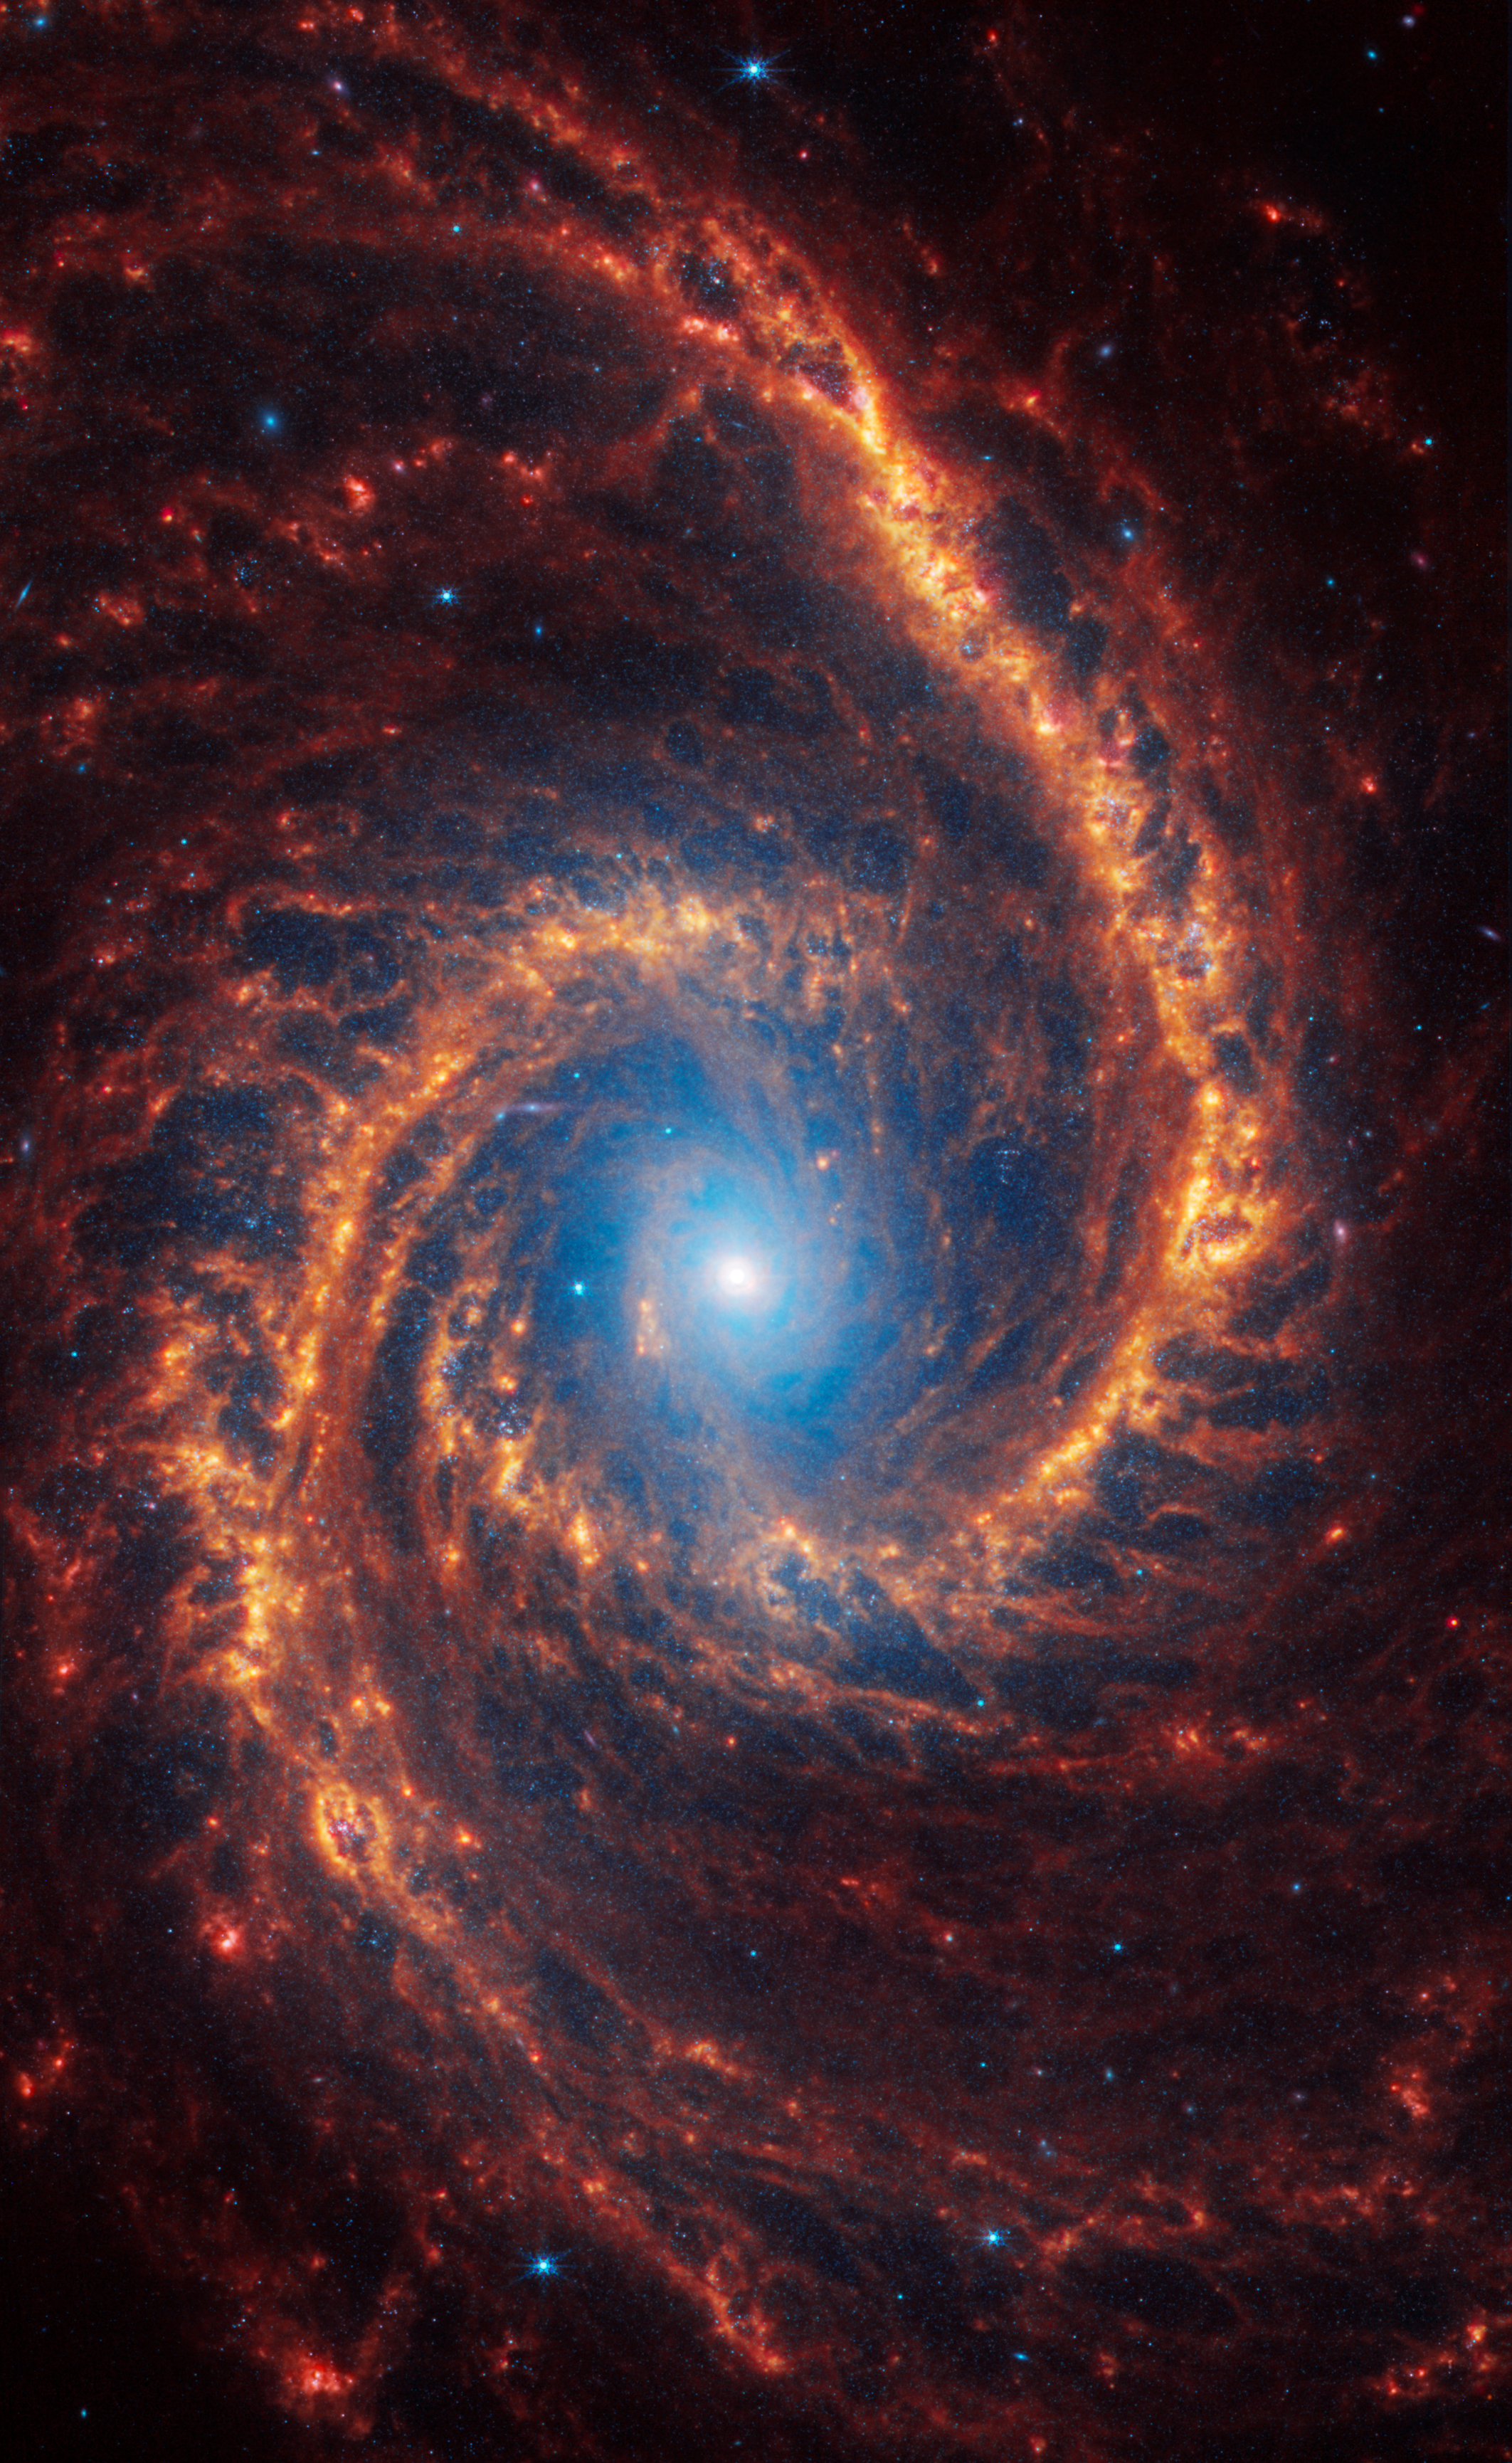

NGC 1566

This spiral galaxy was observed as part of the Physics at High Angular resolution in Nearby GalaxieS (PHANGS) program, a large project that includes observations from several space- and ground-based telescopes of many galaxies to help researchers study all phases of the star formation cycle, from the formation of stars within dusty gas clouds to the energy released in the process that creates the intricate structures revealed by Webb’s new images.

NGC 1566 is 60 million light-years away in the constellation Dorado.

Learn more about what can be seen in this vast collection of Webb images here.

Credit: NASA, ESA, CSA, STScI, J. Lee (STScI), T. Williams (Oxford), R. Chandar (UToledo), D. Calzetti (UMass), PHANGS Team